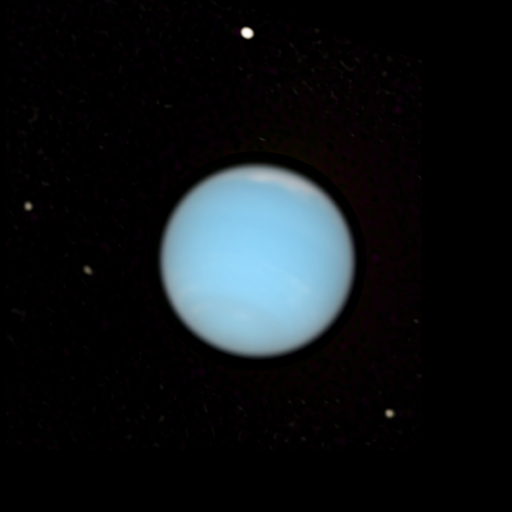

Neptune - natural colour with satellites

This image shows the planet Neptune in its natural colours. Astronomers used Hubble’s assortment of filters to pinpoint high altitude clouds floating above the methane rich atmosphere. The moons that can be seen orbiting Neptune are Proteus (the brightest), Larissa, Despina, and Galatea. Neptune had 13 moons at last count.

Credit: NASA, ESA, E. Karkoschka (University of Arizona), and H.B. Hammel (Space Science Institute, Boulder, Colorado)